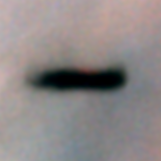

Edge-on protoplanetary disc in the Orion Nebula

Resembling an interstellar Frisbee, this is a disk of dust seen edge-on around a newborn star in the Orion nebula, located 1, 500 light-years away. Because the disk is edge-on, the star is largely hidden inside, in this striking Hubble Space Telescope picture. The disk may be an embryonic planetary system in the making. Our solar system probably formed out of just such a disk 4.5 billion years ago. At 17 times the diameter of our own solar system, this disk is the largest of several recently discovered in the Orion nebula.

The right image was taken through a different filter, which blocks any bright spectral emission lines from the nebula, and hence the disk itself is less distinctly silhouetted against the background.

Credit: Mark McCaughrean (Max-Planck-Institute for Astronomy), C. Robert O'Dell (Rice University), and NASA/ESA